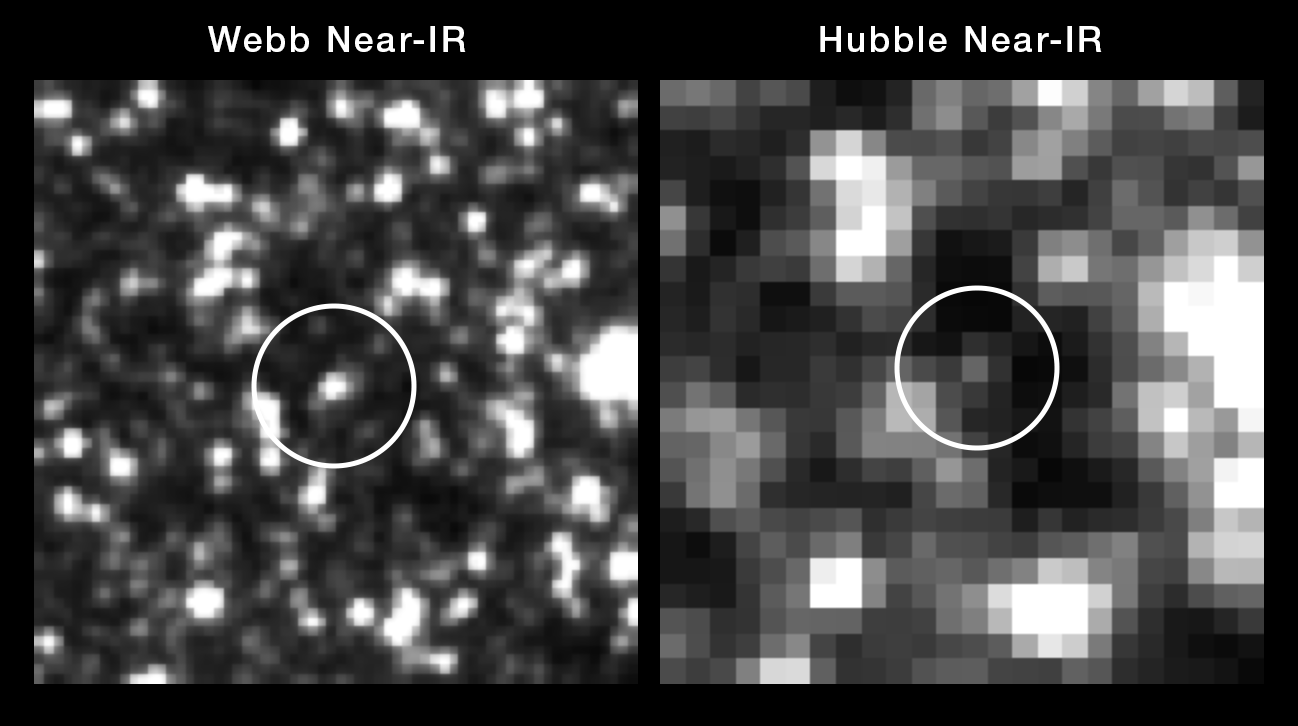

Comparison of Hubble and Webb views of a Cepheid variable star

At the centre of these side-by-side images is a special class of star used as a milepost marker for measuring the Universe’s rate of expansion — a Cepheid variable star. The two images are very pixelated because each is a very zoomed-in view of a distant galaxy. Each of the pixels represents one or more stars. The image from the James Webb Space Telescope is significantly sharper at near-infrared wavelengths than Hubble (which is primarily a visible-ultraviolet light telescope). By reducing the clutter with Webb’s crisper vision, the Cepheid stands out more clearly, eliminating any potential confusion. Webb was used to look at a sample of Cepheids and confirmed the accuracy of the previous Hubble observations that are fundamental to precisely measuring the Universe’s expansion rate and age.

Credit: NASA, ESA, CSA, STScI, A. Riess (JHU/STScI)